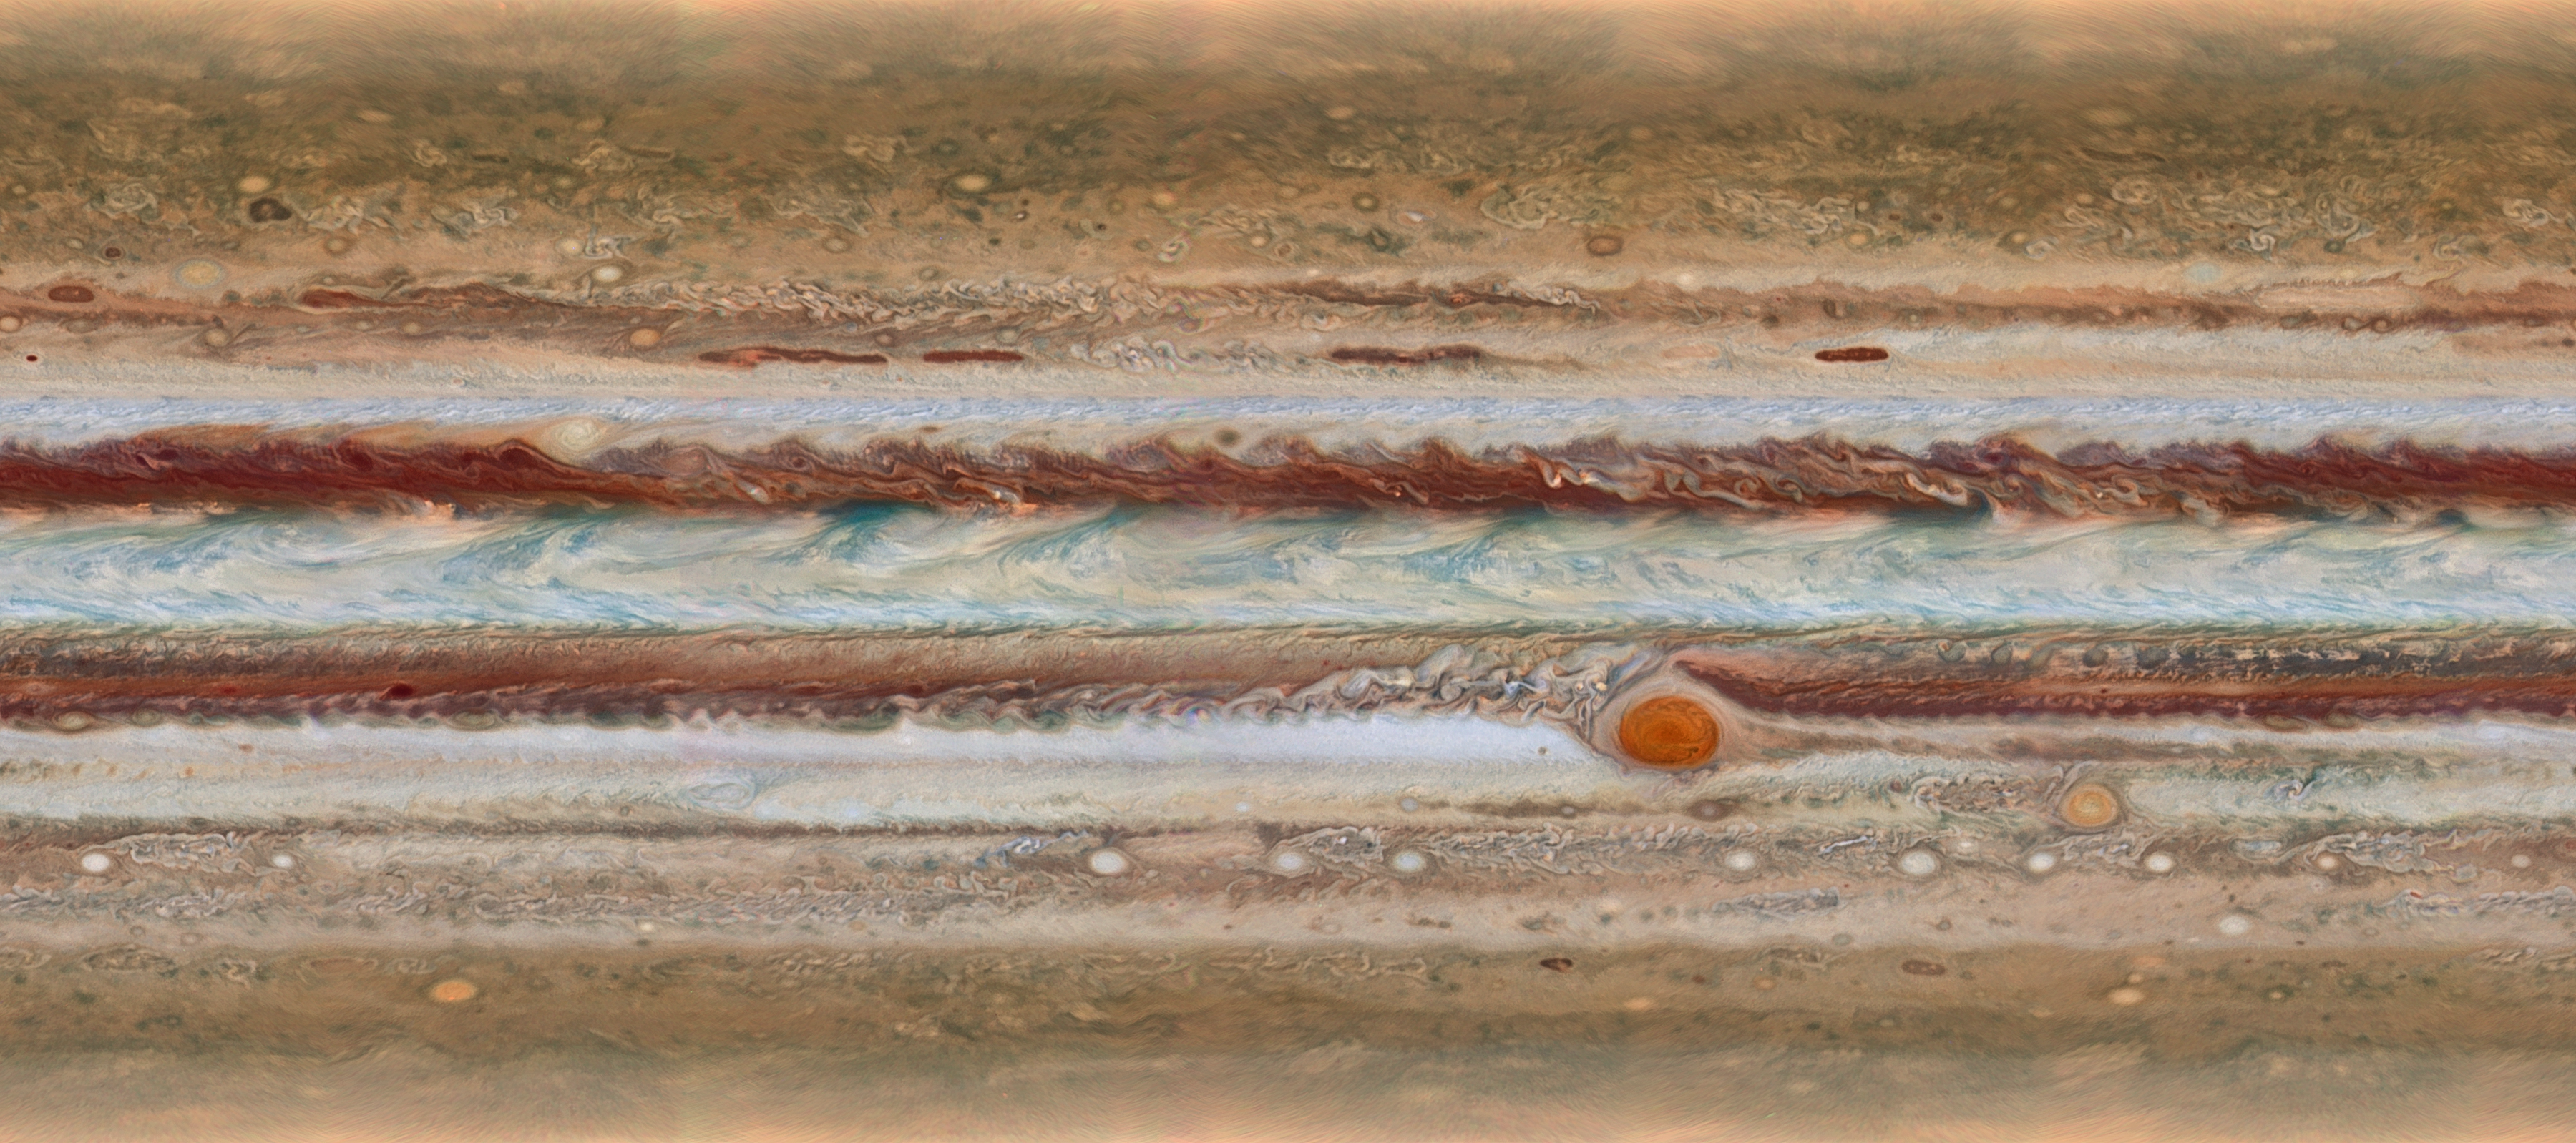

Jupiter at a glance

This new image from the largest planet in the Solar System, Jupiter, was made during the Outer Planet Atmospheres Legacy (OPAL) programme. The images from this programme make it possible to determine the speeds of Jupiter’s winds, to identify different phenomena in its atmosphere and to track changes in its most famous features.

The map shown was observed on 19 January 2015, from 2:00 UT to 12:30 UT.

Credit: NASA, ESA, A. Simon (GSFC), M. Wong (UC Berkeley), and G. Orton (JPL-Caltech)